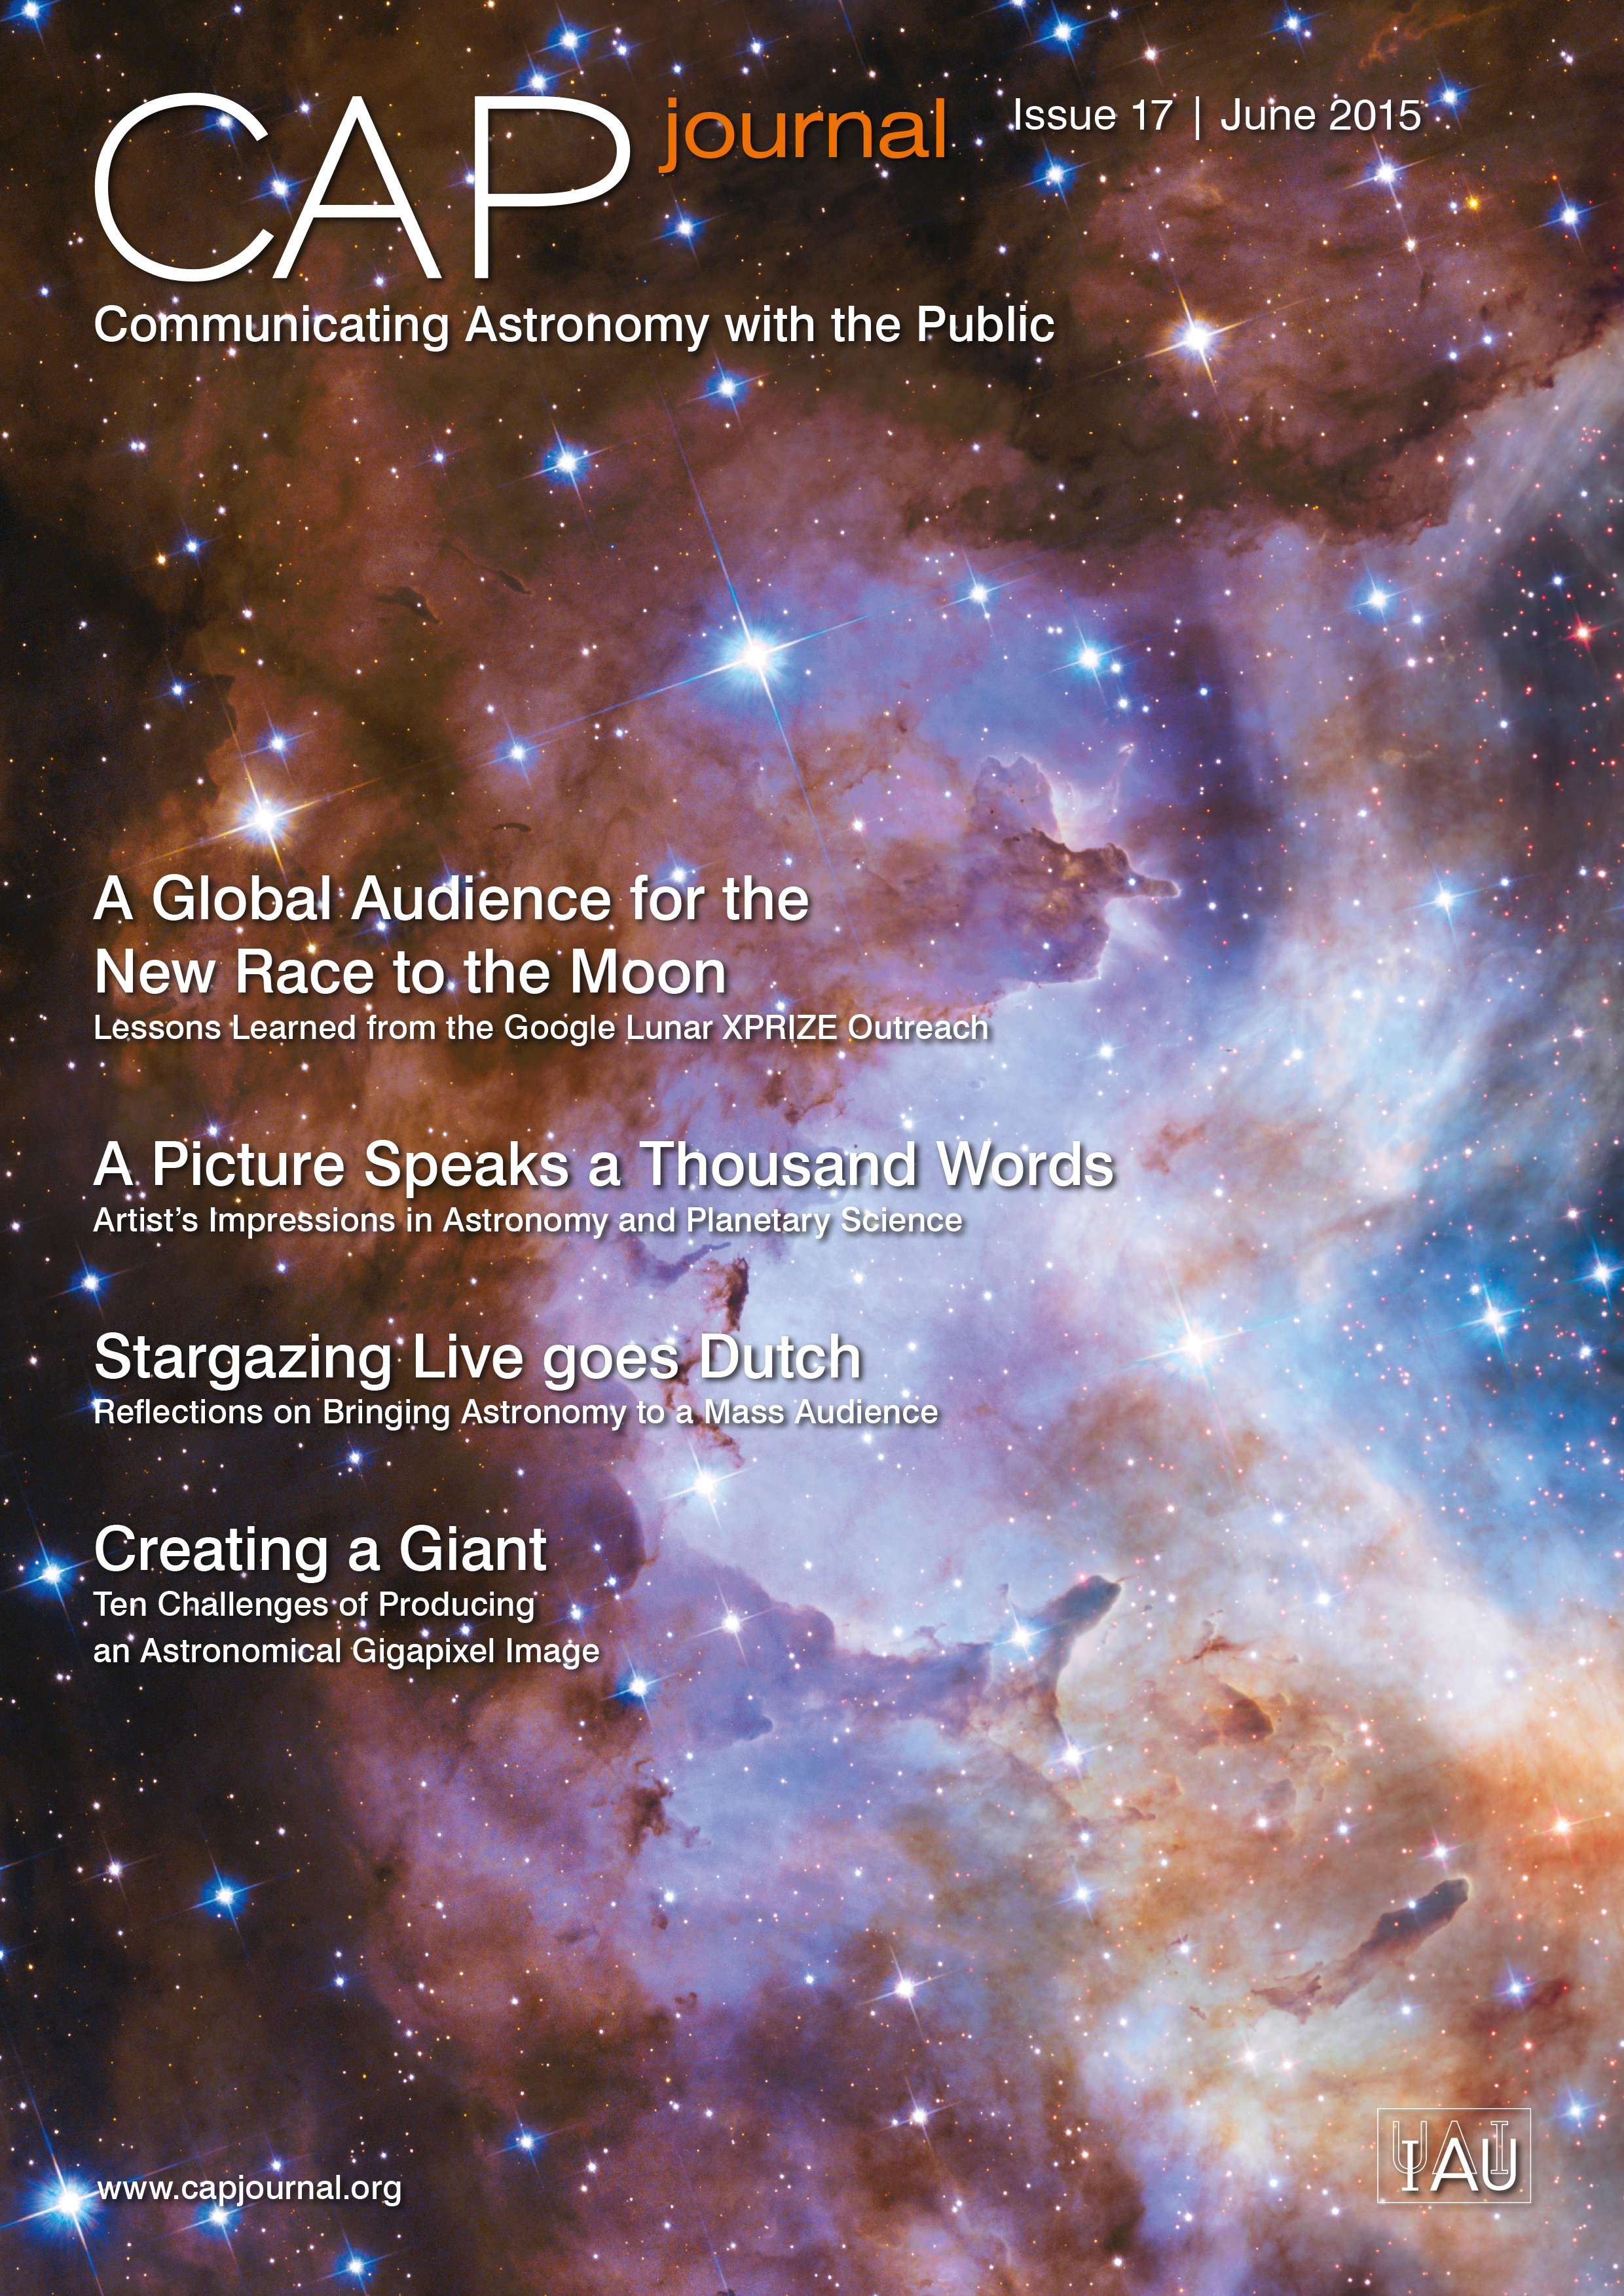

Cover of CAPjournal issue 17

The CAPjournal is a free peer-reviewed journal for astronomy communicators, online and in print. To subscribe to the print or online version please go here. This issue in PDF format is available on: http://www.capjournal.org/issues/17/.

Credit: IAU/ESA/Hubble